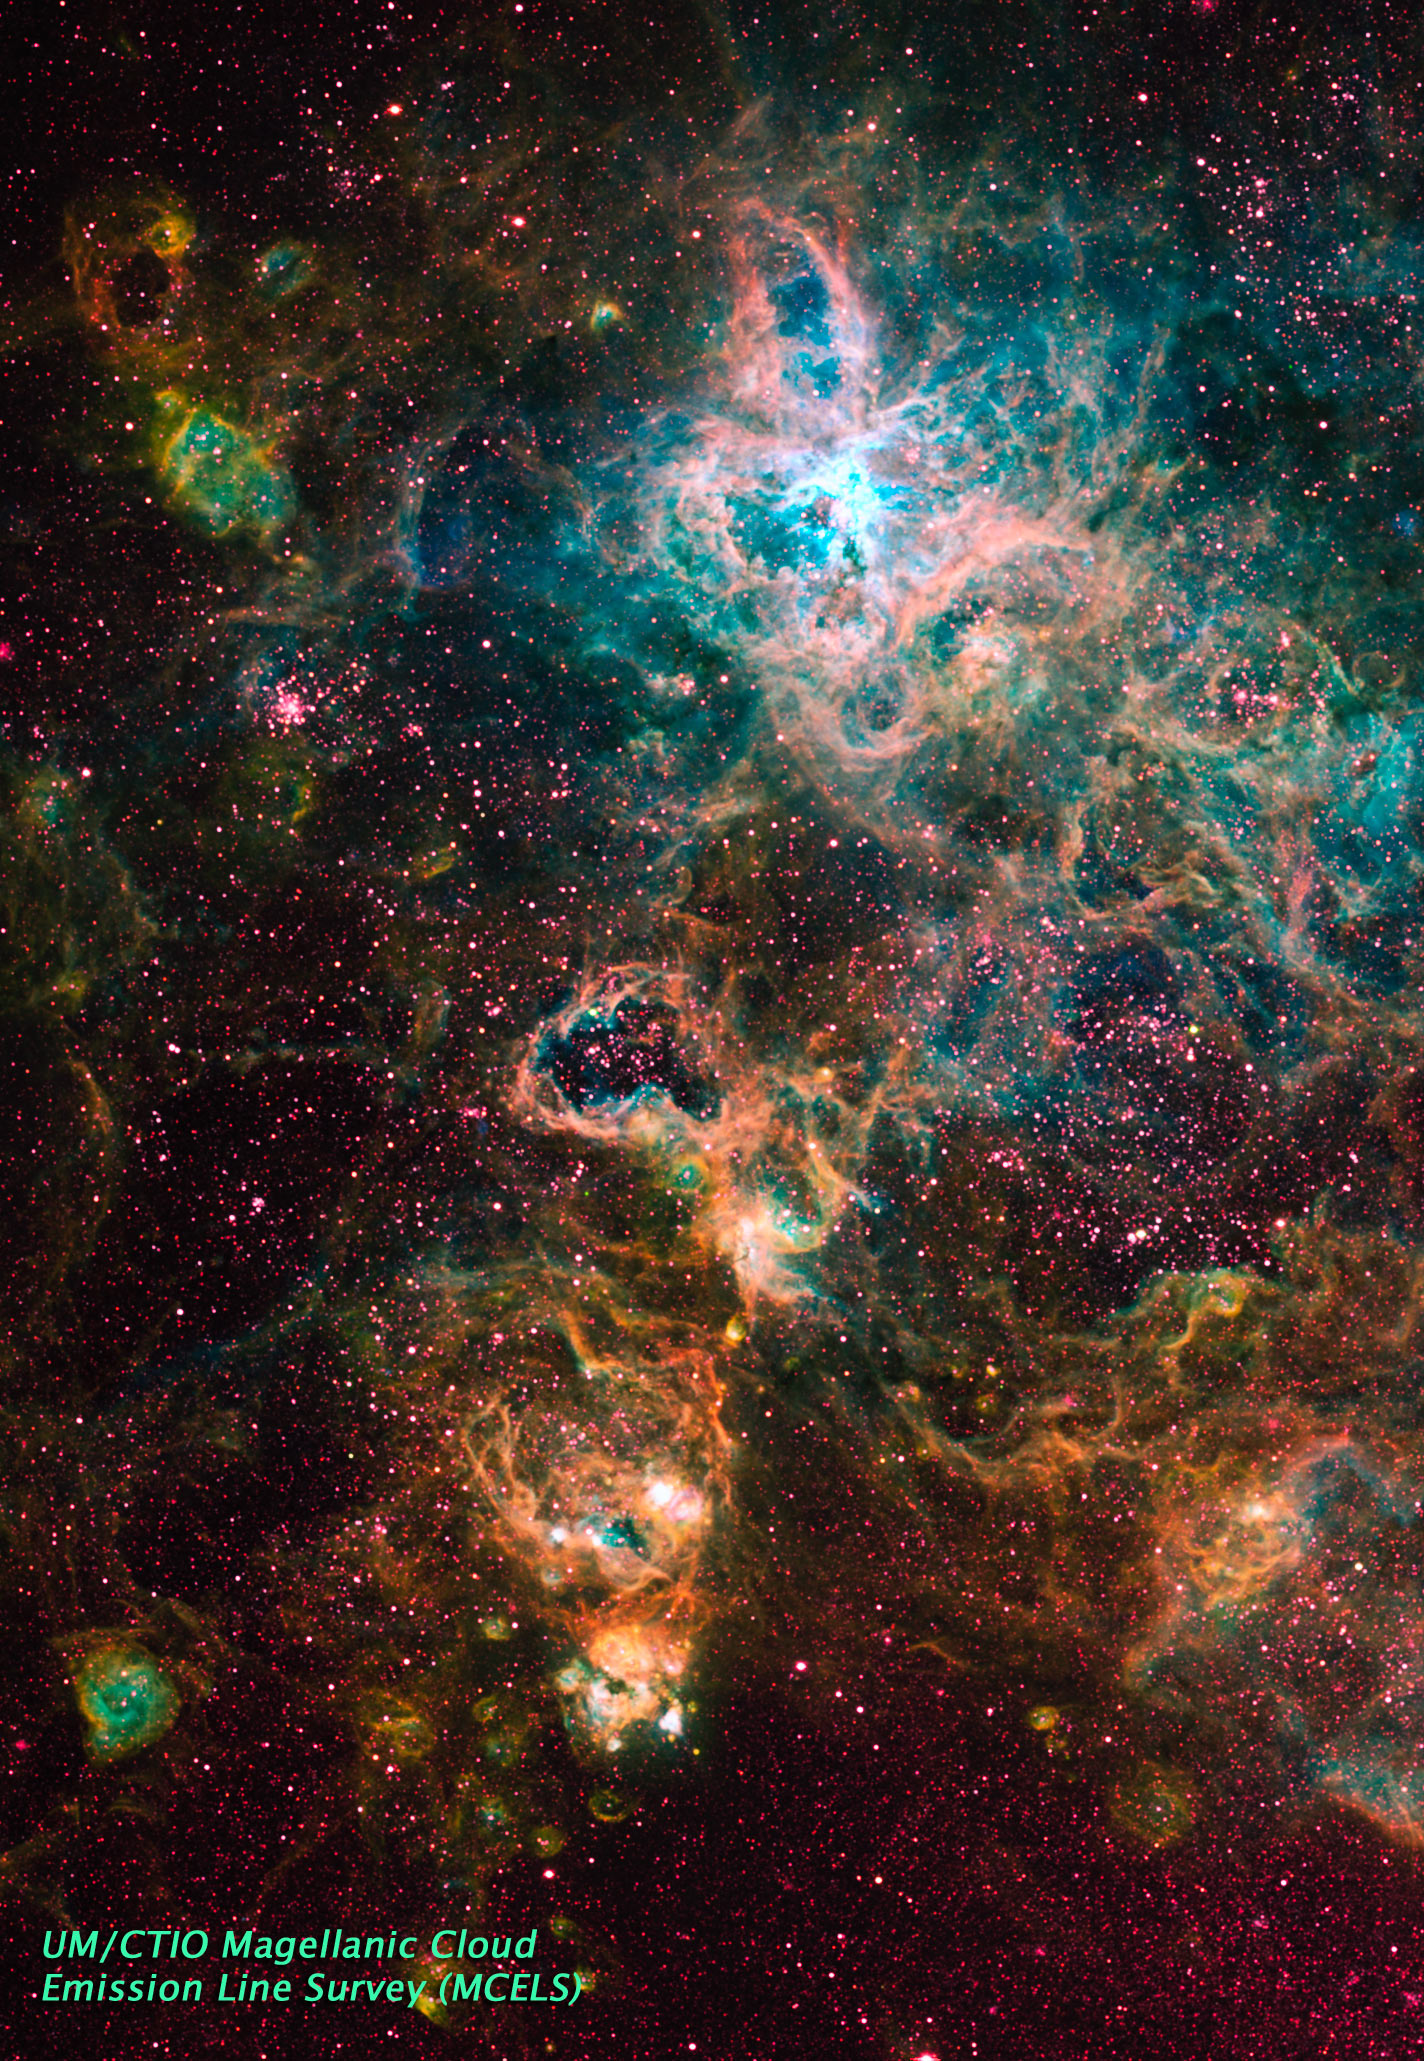

Ground Image of 30 Doradus Region of LMC

This image shows the 30 Doradus region of the Large Magellanic Cloud (LMC). The LMC is a satellite galaxy of our Milky Way and this particular region is the largest and most prolific star forming region in our galaxy. Many of the stars here are among the most massive known. Several of them are over 100 times more massive than our Sun.

Credit: UT/CTIO Magellanic Cloud Emission Line Survey